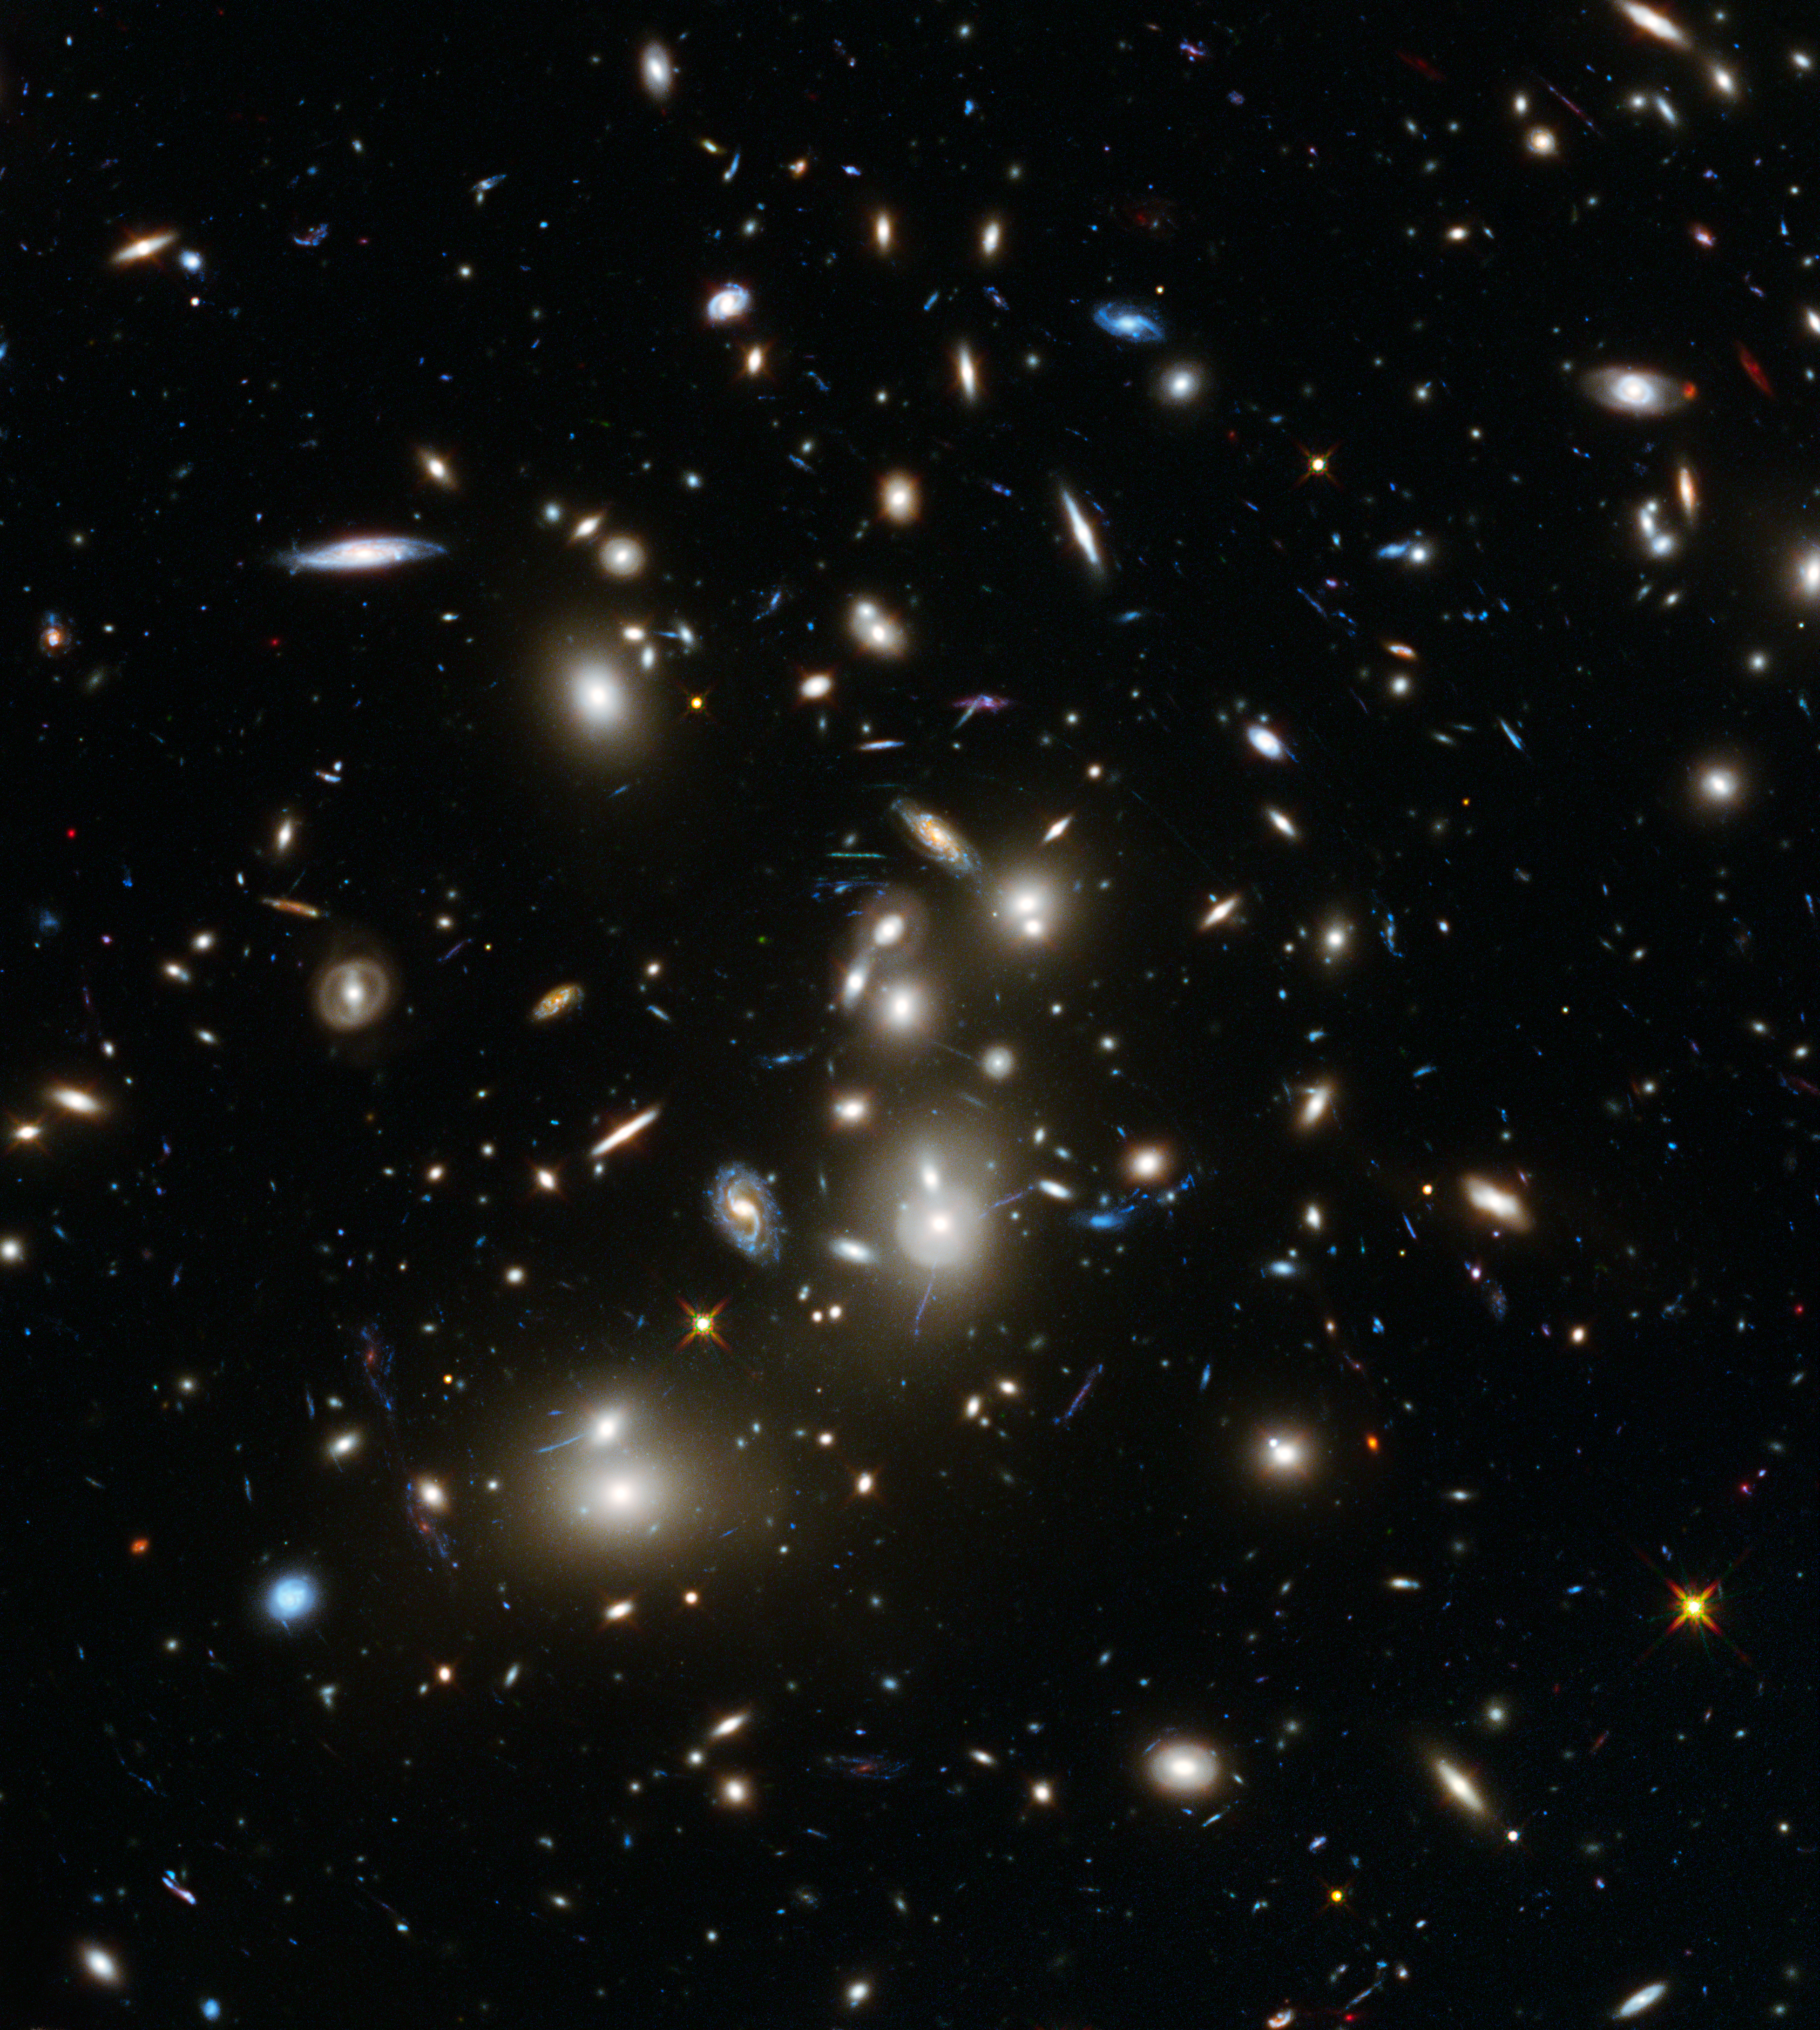

Hubble Frontier Fields view of Abell 2744

This image of Abell 2744 is the first to come from Hubble's Frontier Fields observing programme, which is using the magnifying power of enormous galaxy clusters to peer deep into the distant Universe. Abell 2744, nicknamed Pandora's Cluster, is thought to have a very violent history, having formed from a cosmic pile-up of multiple galaxy clusters.

Abell 2744 is the first of six targets for an observing programme known as Frontier Fields. This three-year, 840-orbit programme will yield our deepest views of the Universe to date, using the power of Hubble to explore more distant regions of space than could otherwise be seen, by observing gravitational lensing effects around six different galaxy clusters.

Credit: NASA, ESA, and J. Lotz, M. Mountain, A. Koekemoer, and the HFF Team (STScI).